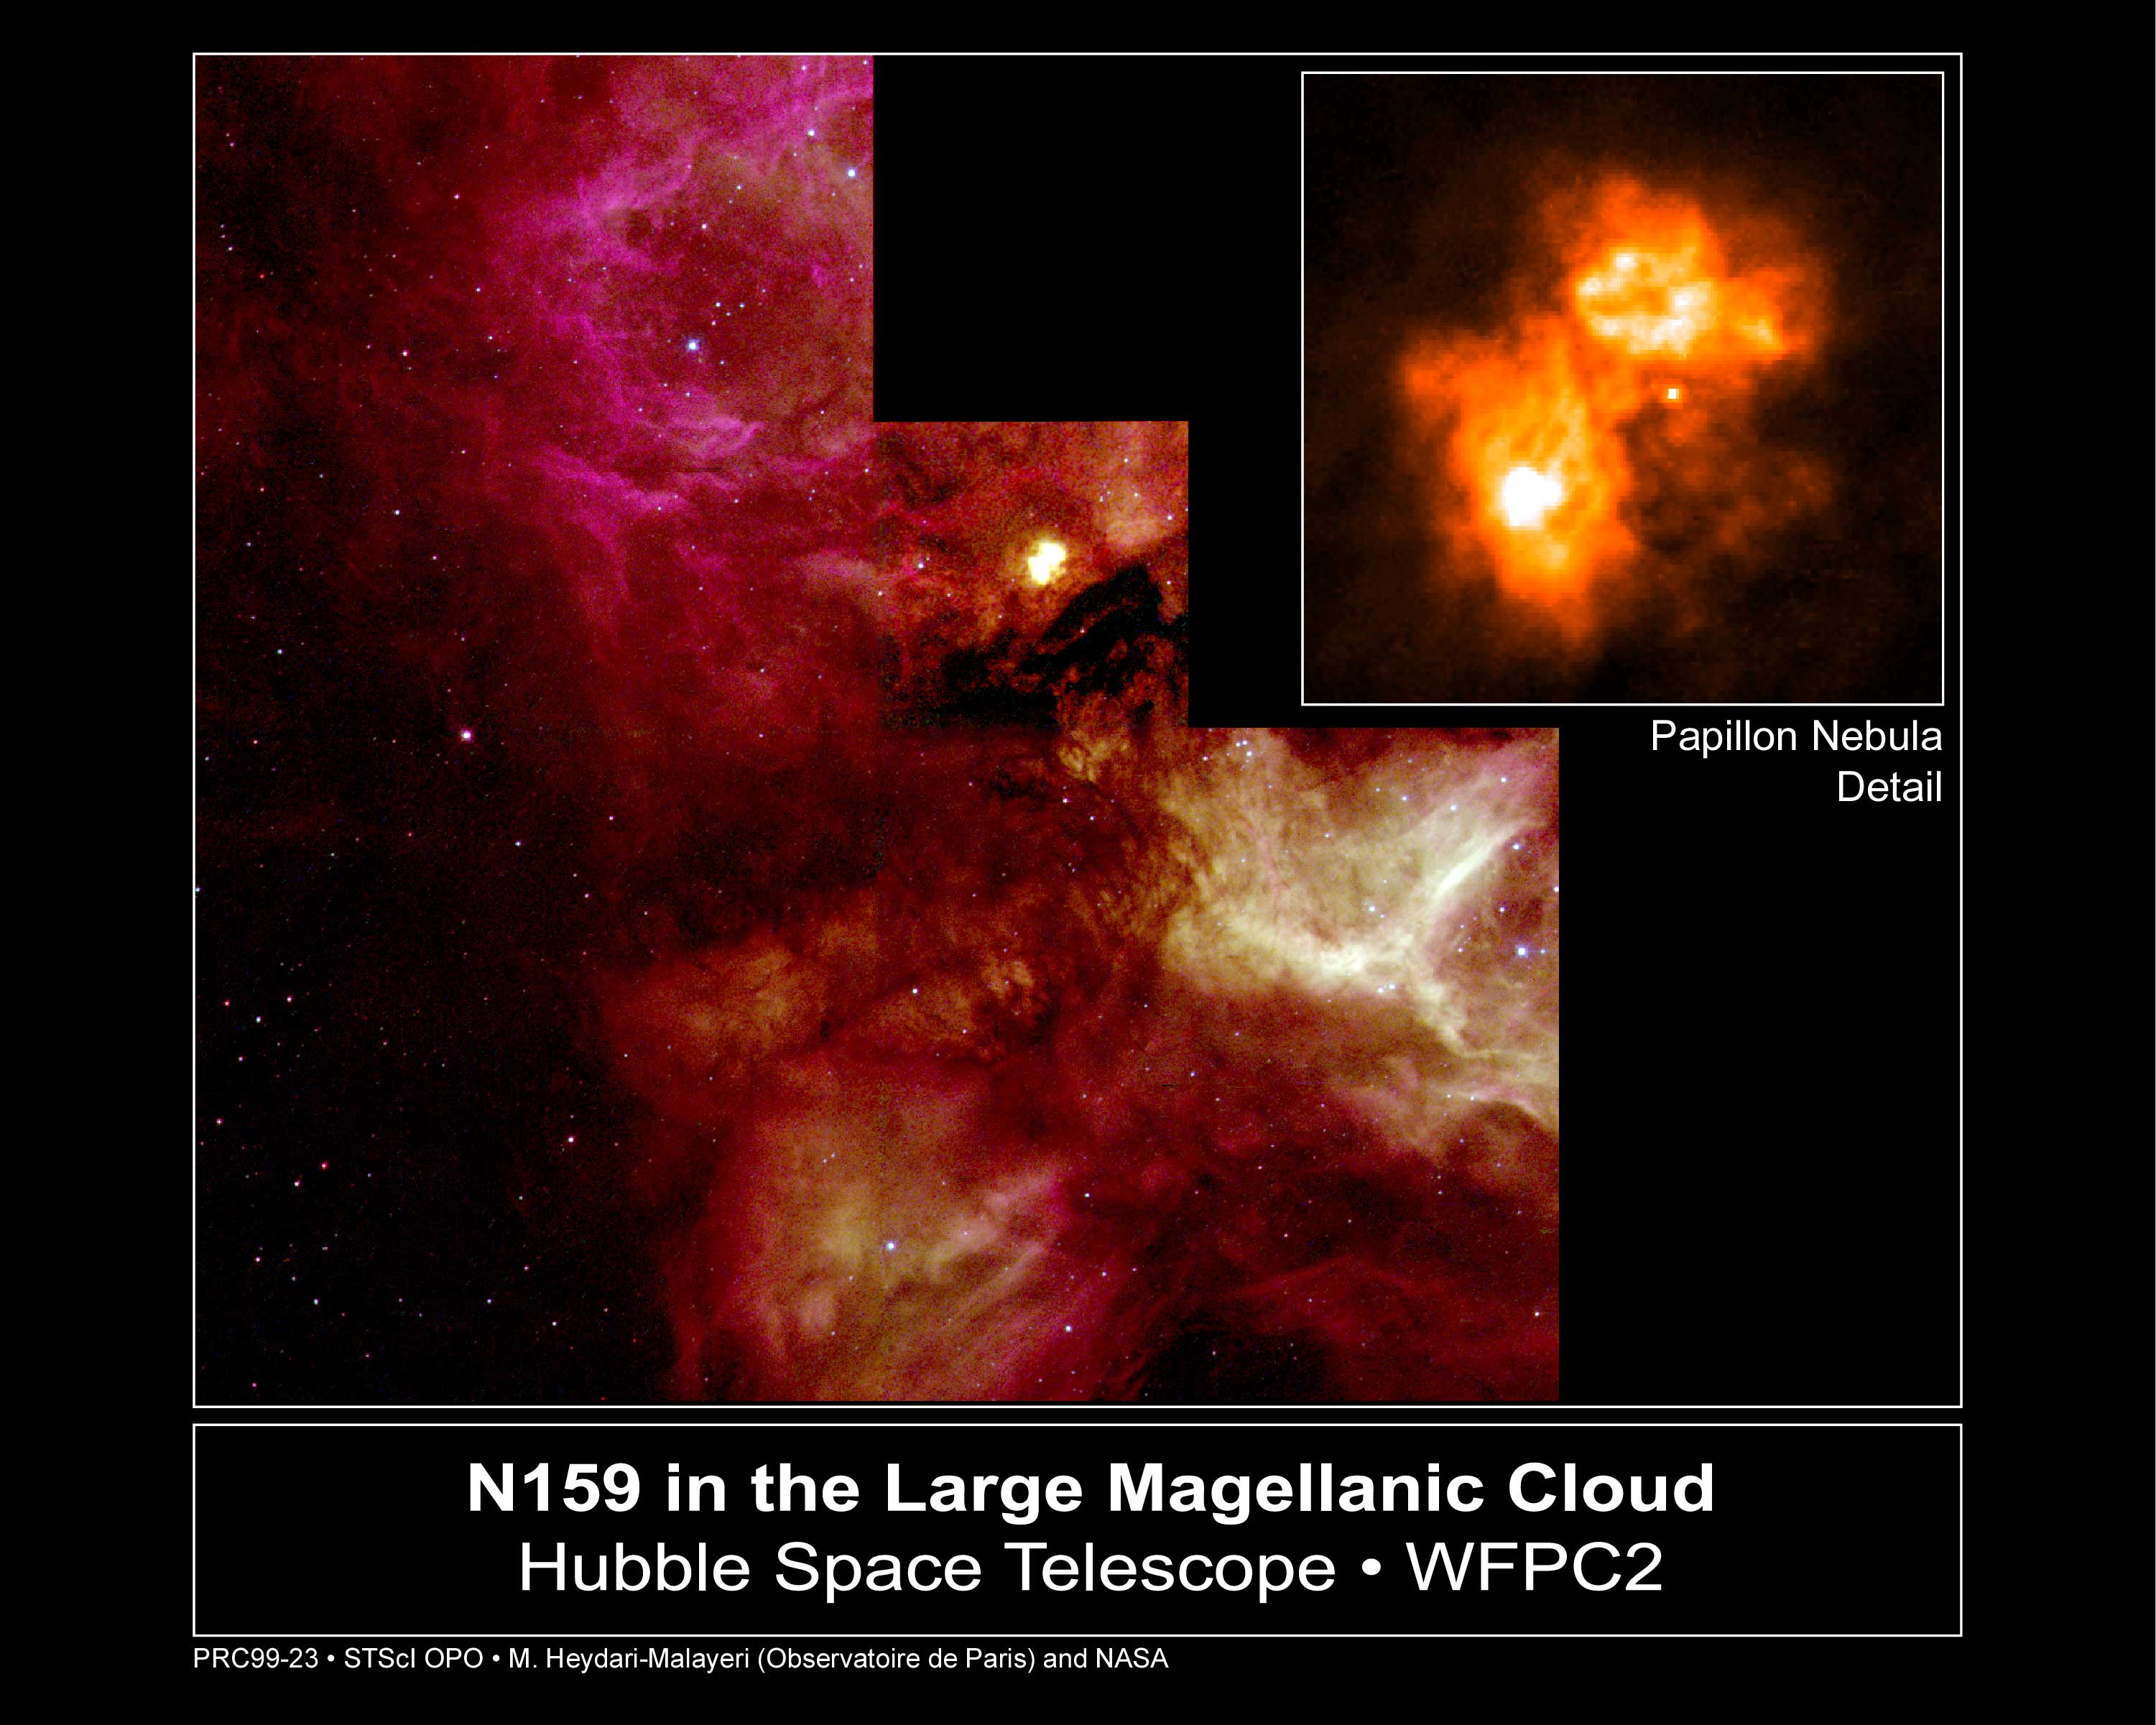

N159 in the Large Magellanic Cloud

A NASA/ESA Hubble Space Telescope view of a turbulent cauldron of starbirth, called N159, taking place 170, 000 light-years away in our satellite galaxy, the Large Magellanic Cloud (LMC). Torrential stellar winds from hot newborn massive stars within the nebula sculpt ridges, arcs, and filaments in the vast cloud, which is over 150 light-years across.

Credit: M. Heydari-Malayeri (Paris Observatory) and NASA/ESA